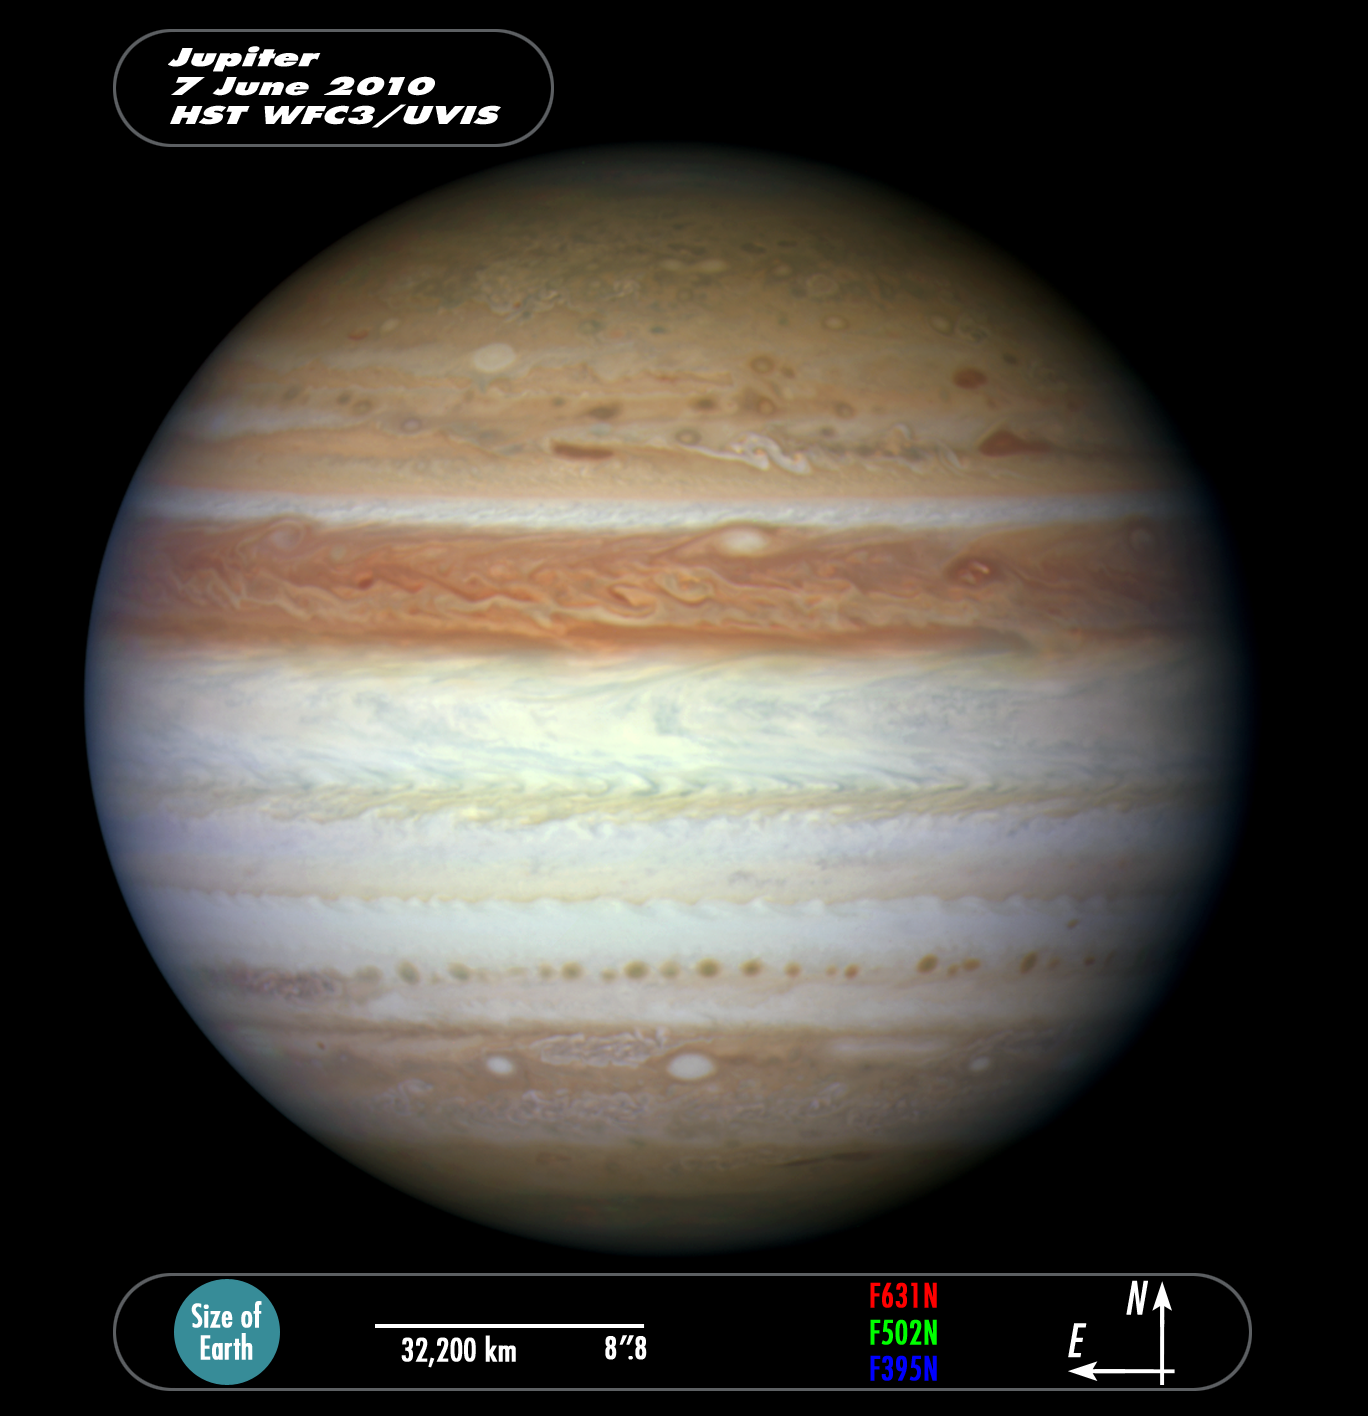

Compass and scale image of Jupiter

This image shows the recent Jupiter image compared to the size of the Earth and indicates the orientation and the filters used for the composite.

Credit: NASA, ESA and Z. Levay (STScI)